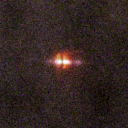

110-3035

One of 42 new proplyds discovered in the Orion Nebula, 110-3035 is one of the bright proplyds that lies relatively close to the nebula’s brightest star, Theta 1 Orionis C.

Credit: NASA/ESA and L. Ricci (ESO)